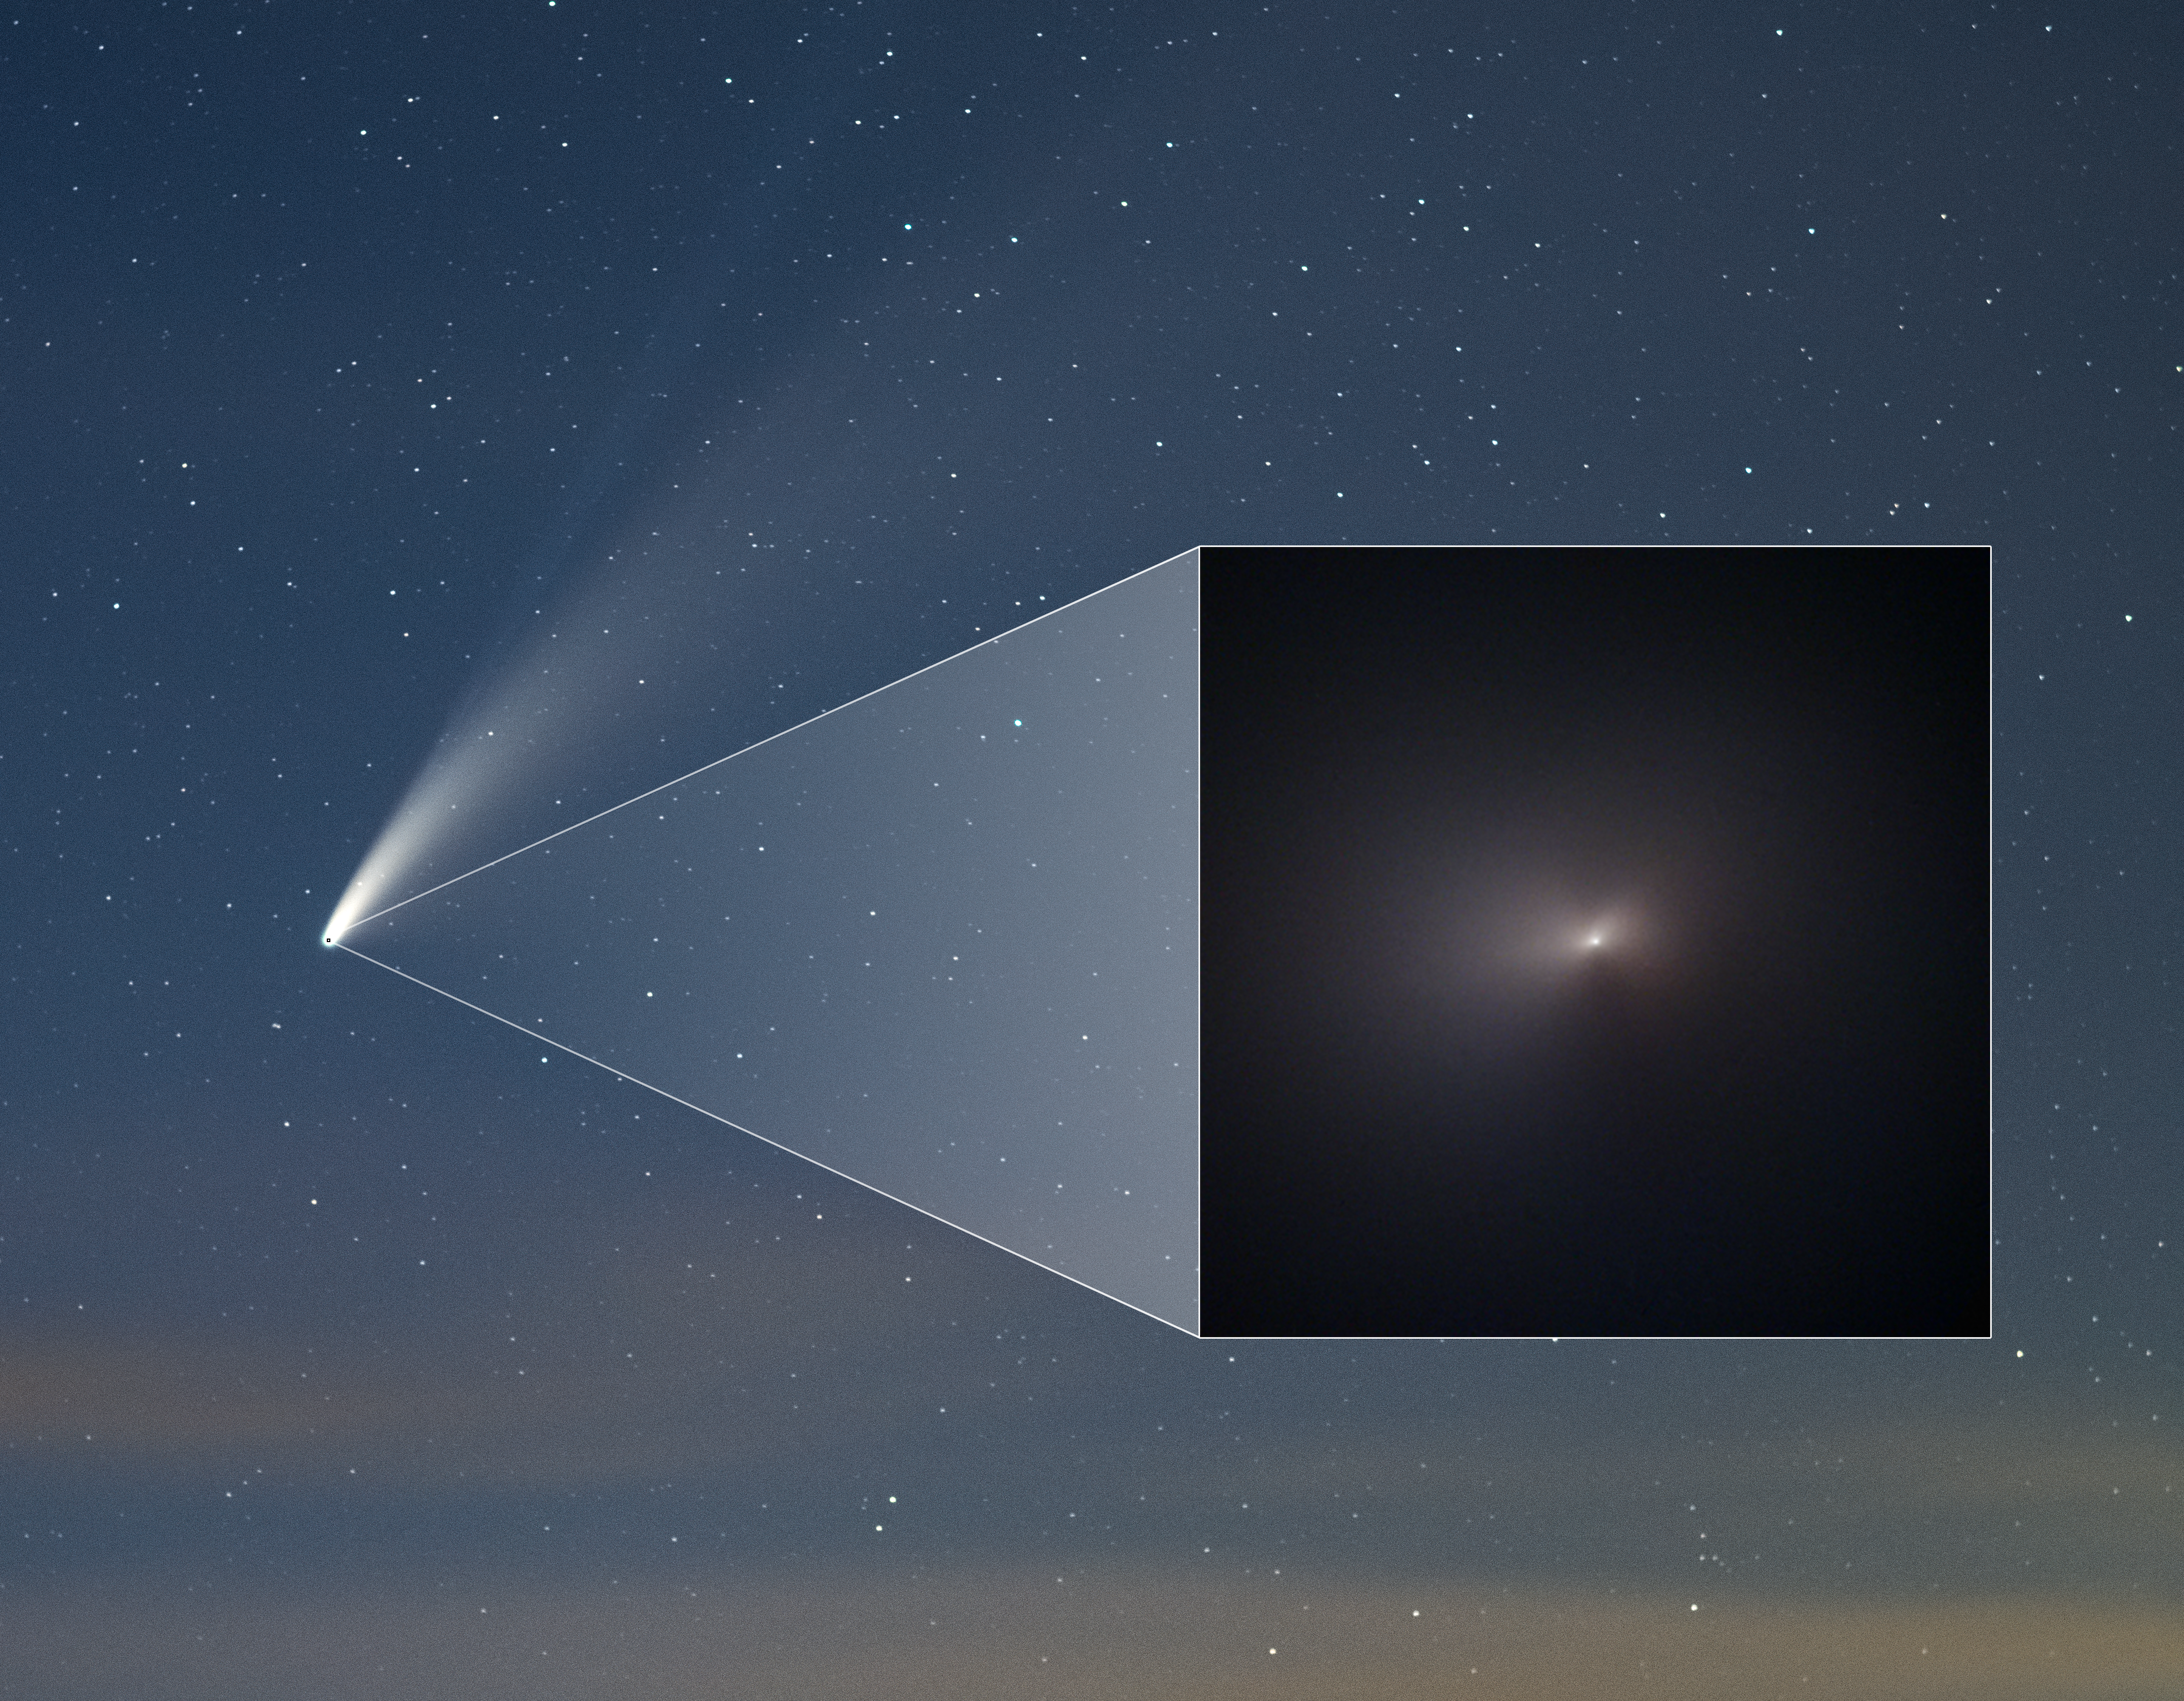

Comet NEOWISE Pullout in Ground-Based Image

The NASA/ESA Hubble Space Telescope has captured the closest images yet of the sky’s latest visitor to make the headlines, comet C/2020 F3 NEOWISE, after it passed by the Sun. This image features the color image of the comet taken by Hubble on 8 August 2020 within the frame of a ground-based image of the comet that was taken from the Northern Hemisphere on 18 July 2020.

Hubble's image of the comet shows a portion of the comet’s coma, the fuzzy glow, which measures about 18,000 kilometers across in this image. Comet NEOWISE won’t pass through the inner solar system for another nearly 7,000 years.

Credit: NASA, ESA, Q. Zhang (California Institute of Technology), A. Pagan (STScI), and Z. Levay